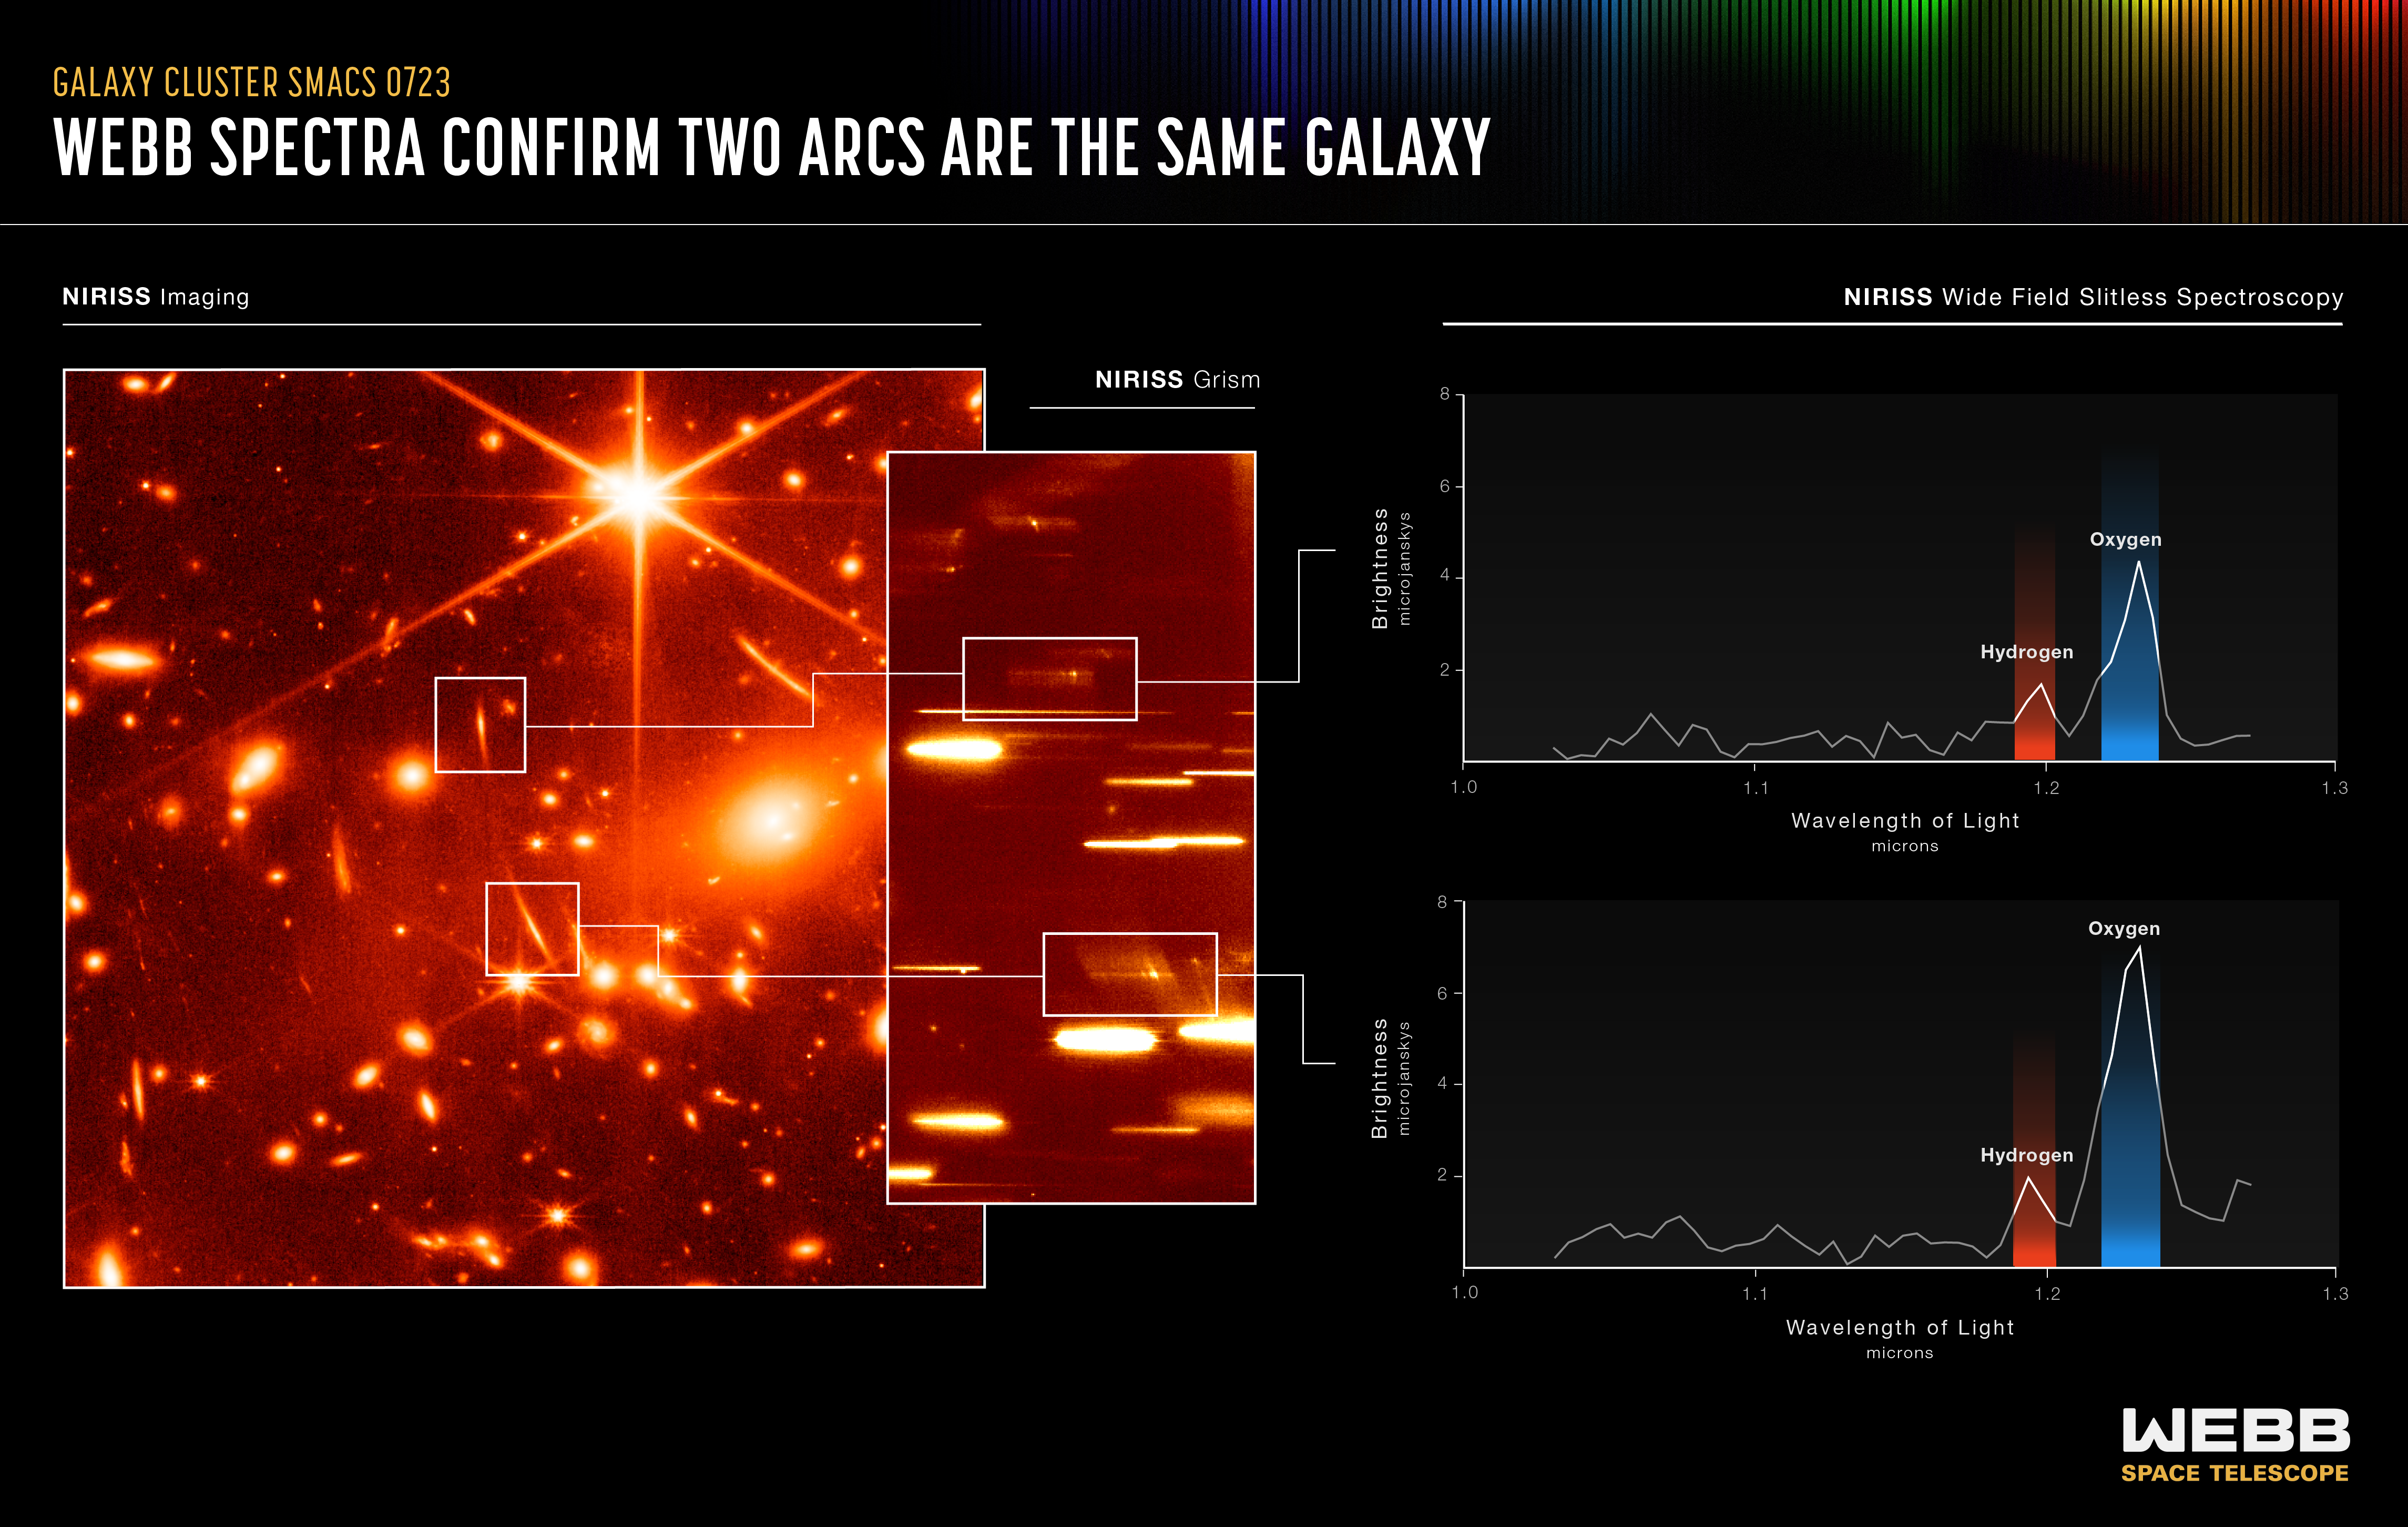

Webb Spectra Confirm Two Arcs Are the Same Galaxy (NIRISS Emission Spectra)

At far left is a near-infrared image of galaxy cluster SMACS 0723. A group of massive galaxies below and to the right of the bright central star have distorted, magnified, and mirrored many galaxies in this field.

By quickly examining the image at left by eye, it becomes clearer that one arc may be made up of two similar looking galaxies. Their bright central regions match, despite their stretched appearances. These may be lensed galaxies – one galaxy that is mirrored in a second location. Are they the same? Researchers can’t be sure from the image alone – more data are needed to confirm a match.

Scientists do this by gathering spectra, which spread light out so they can fully examine an object’s makeup. Webb’s Near-Infrared Imager and Slitless Spectrograph (NIRISS), which gathers spectra of every object in any field it observes, was pointed at the galaxy cluster to gather more detail. A segment of the NIRISS grism image (an instrument that has a grating, or stair steps, on a prism), at centre, shows how ionised oxygen and atomic hydrogen emission lines are distributed along the arc.

Next, the spectra from each of these two galaxies were plotted as graphs, shown at right, to reveal their compositions. The graphs, known as spectra, match, which indicates that these arcs are mirror images of the same galaxy. Webb’s spectra from NIRISS also quickly proved that light from both galaxies was emitted 9.3 billion years ago, further confirming they are one and the same.

Using Webb’s NIRISS is like opening a treasure chest overflowing with spectra. For example, this instrument can disperse the spectra along the image vertically and horizontally. Researchers can use both modes to untangle which lines match each source.

Every object’s image can be transformed into spectra like the two shown above. So even if researchers aren’t intending to study a particular galaxy in the field, they may make a surprise discovery.

For a full array of Webb’s first images and spectra, including downloadable files, please visit: https://esawebb.org/initiatives/webbs-first-images/

NIRISS was contributed by the Canadian Space Agency (CSA). The instrument was designed and built by Honeywell in collaboration with the Université de Montréal and the National Research Council Canada.

Credit: NASA, ESA, CSA, and STScI